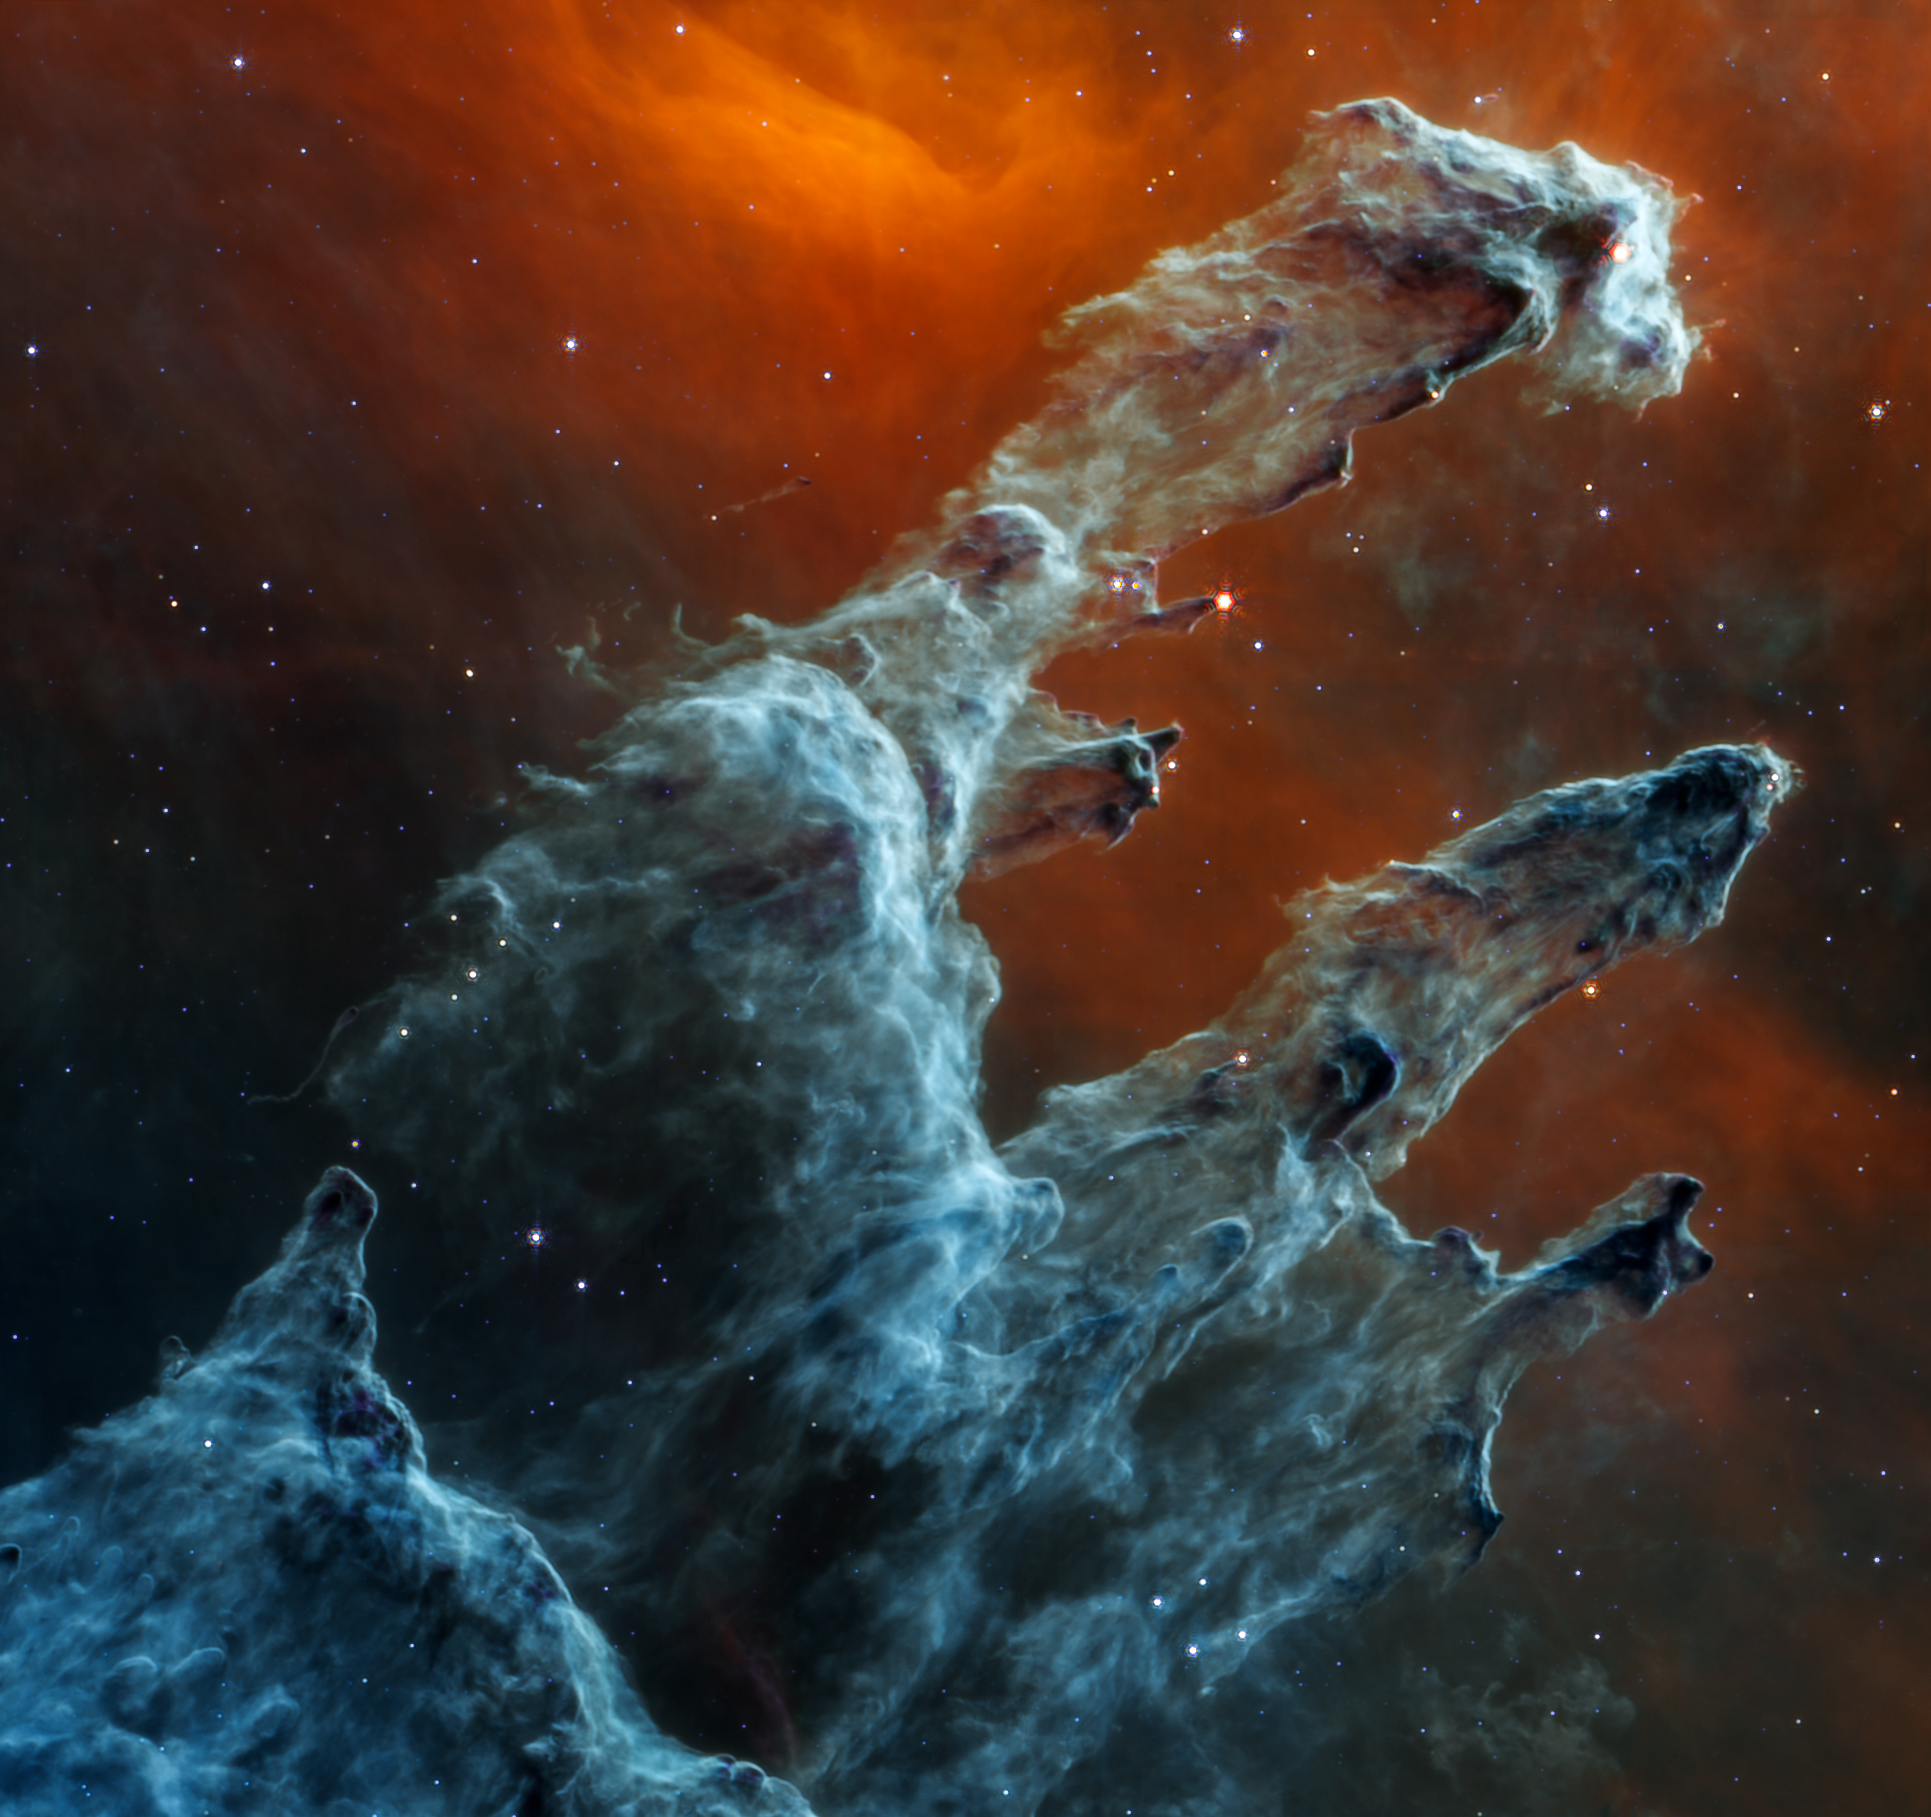

Webb’s Instruments Showcase the Pillars of Creation (MIRI)

The NASA/ESA/CSA James Webb Space Telescope’s mid-infrared view of the Pillars of Creation strikes a chilling tone. Thousands of stars that exist in this region disappear from view — and seemingly endless layers of gas and dust become the centrepiece.

The detection of dust by Webb’s Mid-Infrared Instrument (MIRI) is extremely important — dust is a major ingredient for star formation. Many stars are actively forming in these dense blue-grey pillars. When knots of gas and dust with sufficient mass form in these regions, they begin to collapse under their own gravitational attraction, slowly heat up, and eventually form new stars.

Although the stars appear to be missing, they aren’t. Stars typically do not emit much mid-infrared light. Instead, they are easiest to detect in ultraviolet, visible, and near-infrared light. In this MIRI view, two types of stars can be identified. The stars at the end of the thick, dusty pillars have recently eroded most of the more distant material surrounding them but they can be seen in mid-infrared light because they are still surrounded by cloaks of dust. In contrast, blue tones indicate stars that are older and have shed most of their gas and dust.

Mid-infrared light also details dense regions of gas and dust. The red region toward the top, which forms a delicate V shape, is where the dust is both diffuse and cooler. And although it may seem like the scene clears toward the bottom left of this view, the darkest grey areas are where densest and coolest regions of dust lie. Notice that there are many fewer stars and no background galaxies popping into view.

Webb’s mid-infrared data will help researchers determine exactly how much dust is in this region — and what it’s made of. These details will make models of the Pillars of Creation far more precise. Over time, we will begin to understand more clearly how stars form and burst out of these dusty clouds over millions of years.

Contrast this view with Webb’s near-infrared light image.

The Pillars of Creation is a small region within the vast Eagle Nebula, which lies 6,500 light-years away.

MIRI was contributed by ESA and NASA, with the instrument designed and built by a consortium of nationally funded European Institutes (The MIRI European Consortium) in partnership with JPL and the University of Arizona.

Credit: NASA, ESA, CSA, STScI, J. DePasquale (STScI), A. Pagan (STScI)